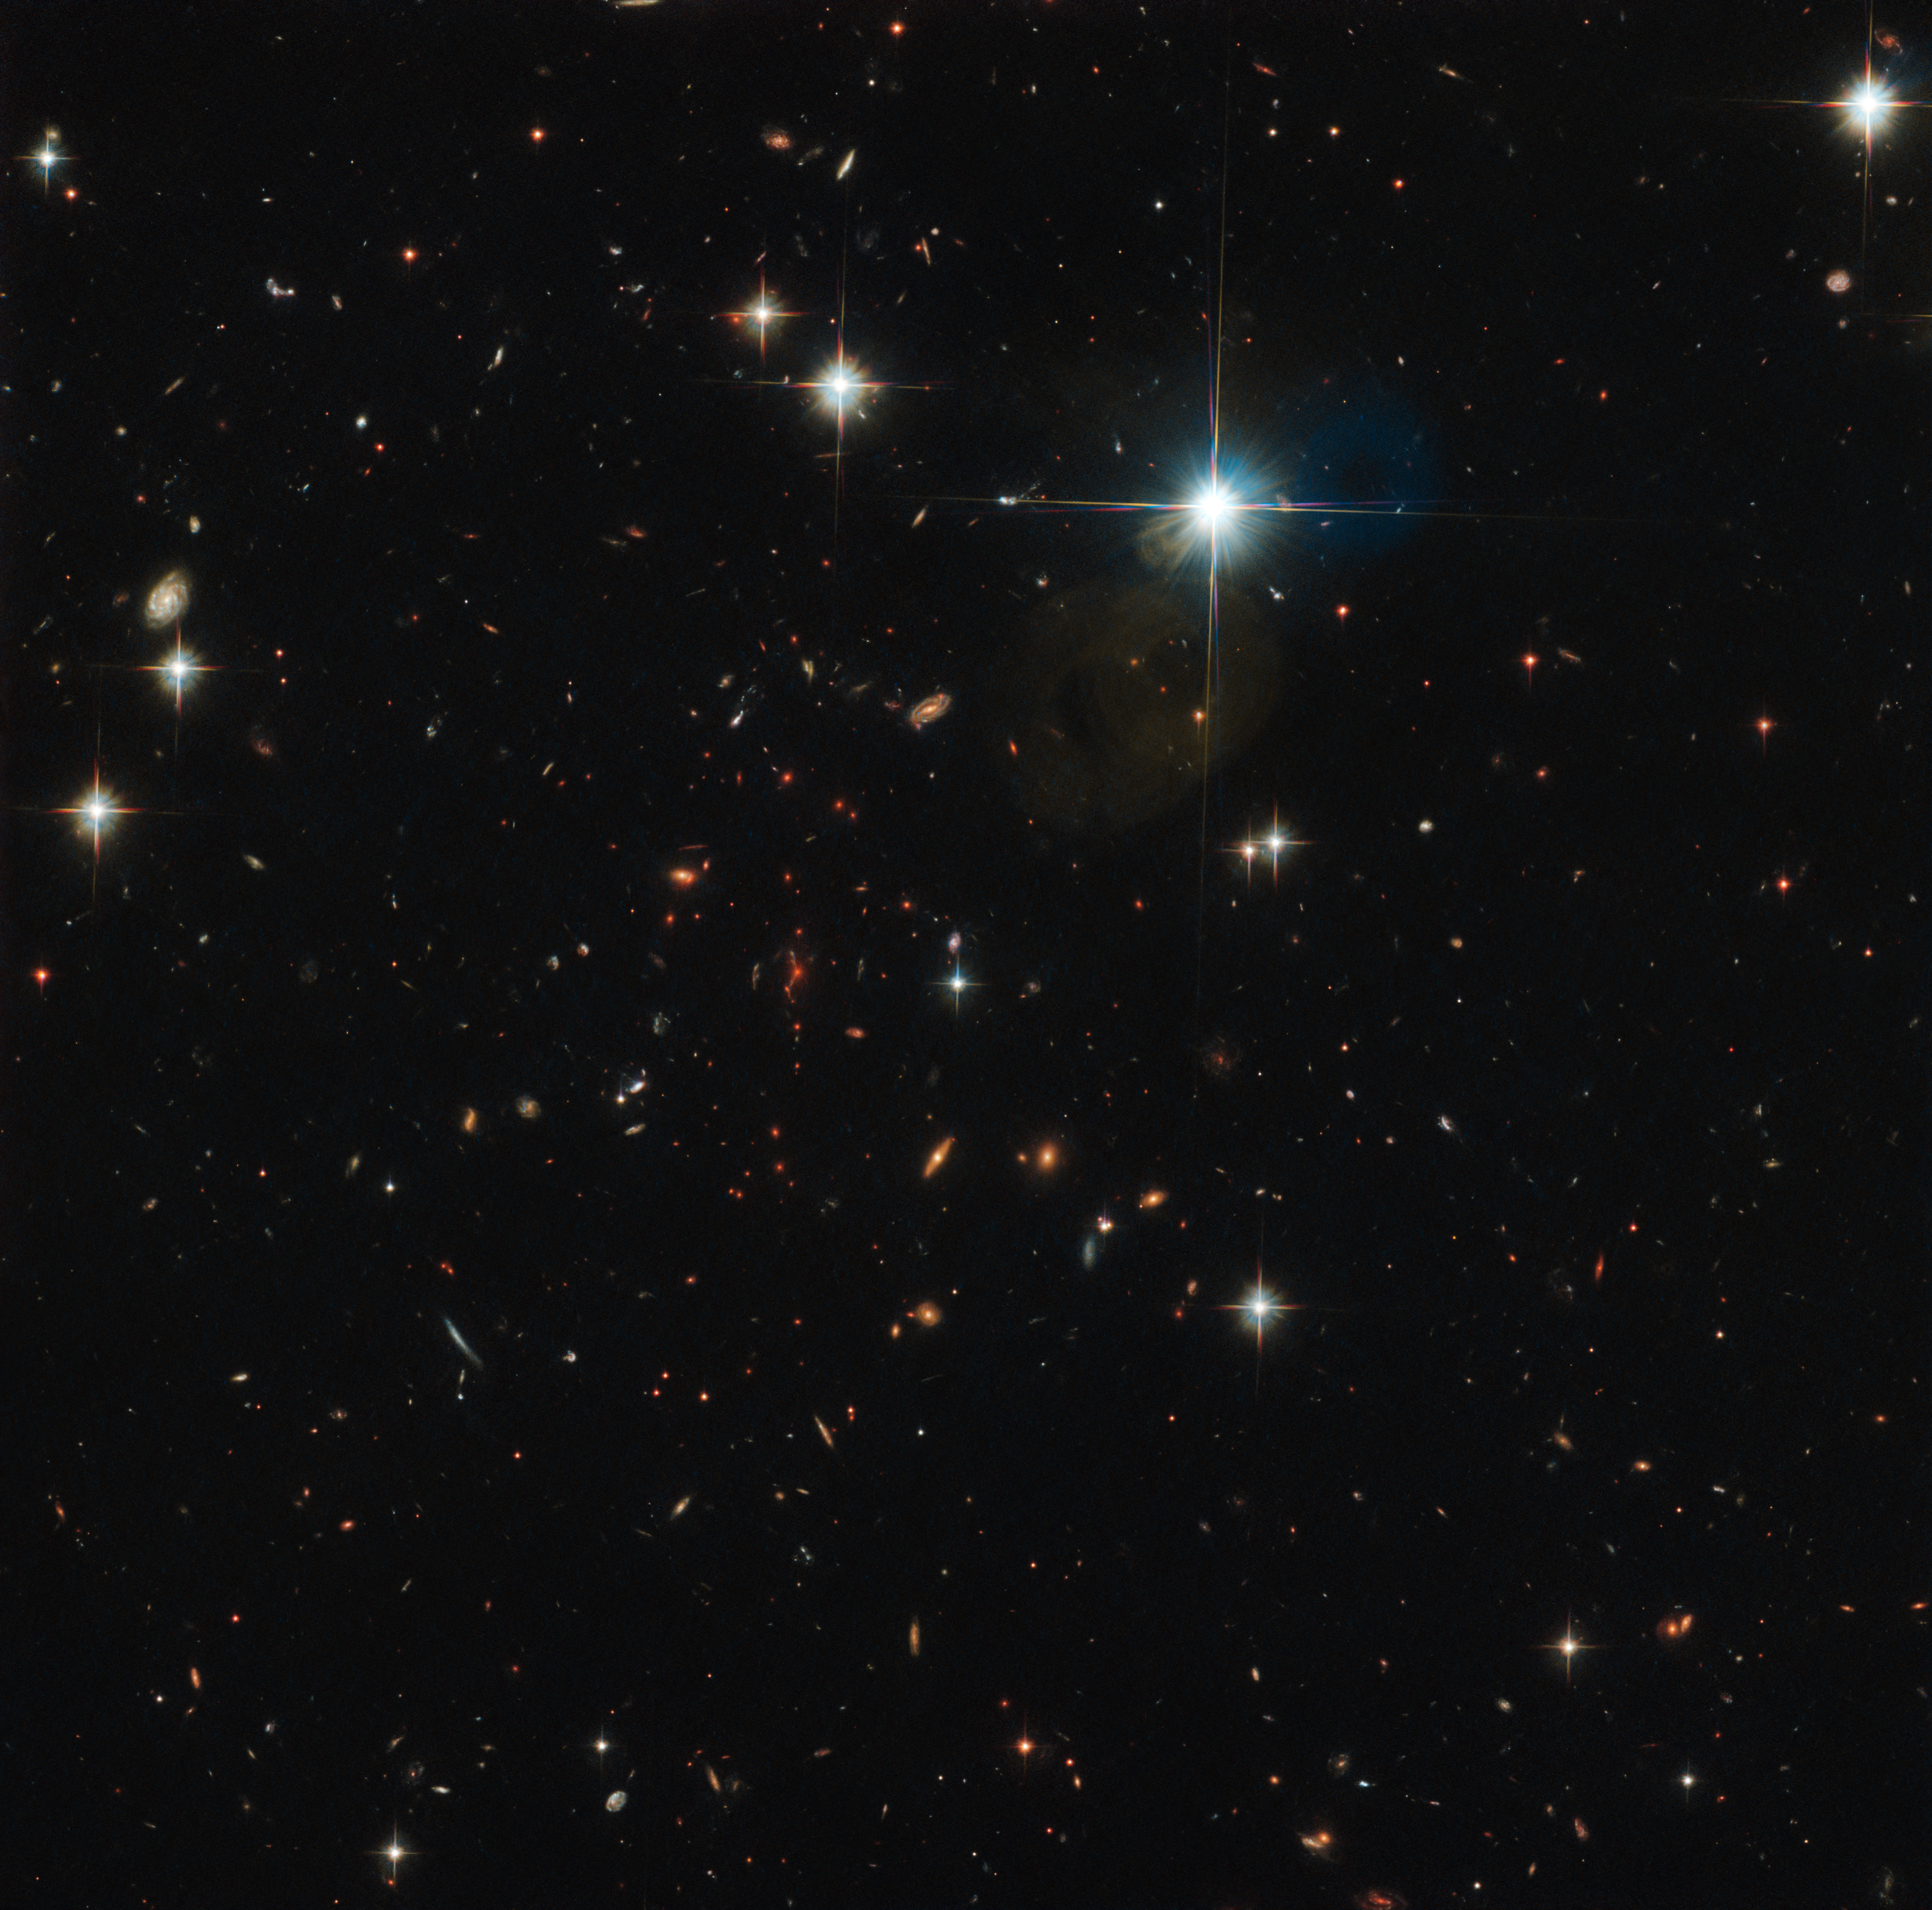

Distant and ancient

Dotted across the sky in the constellation of Pictor (The Painter’s Easel) is the galaxy cluster highlighted here by the NASA/ESA Hubble Space Telescope: SPT-CL J0615-5746, or SPT0615 for short. First discovered by the South Pole Telescope less than a decade ago, SPT0615 is exceptional among the myriad clusters so far catalogued in our map of the Universe — it is the highest-redshift cluster for which a full, strong lens model is published.

SPT0615 is a massive cluster of galaxies, one of the farthest observed to cause gravitational lensing. Gravitational lensing occurs when light from a background object is deflected around mass between the object and the observer. Among the identified background objects, there is SPT0615-JD, a galaxy that is thought to have emerged just 500 million years after the Big Bang. This puts it among the very earliest structures to form in the Universe. It is also the farthest galaxy ever imaged by means of gravitational lensing.

Just as ancient paintings can tell us about the period of history in which they were painted, so too can ancient galaxies tell us about the era of the Universe in which they existed. To learn about cosmological history, astronomers explore the most distant reaches of the Universe, probing ever further out into the cosmos. The light from distant objects travels to us from so far away that it takes an immensely long time to reach us, meaning that it carries information from the past — information about the time at which it was emitted.

By studying such distant objects, astronomers are continuing to fill the gaps in our picture of what the very early Universe looked like, and uncover more about how it evolved into its current state.

Credit: ESA/Hubble & NASA, I. Karachentsev et al., F. High et al.